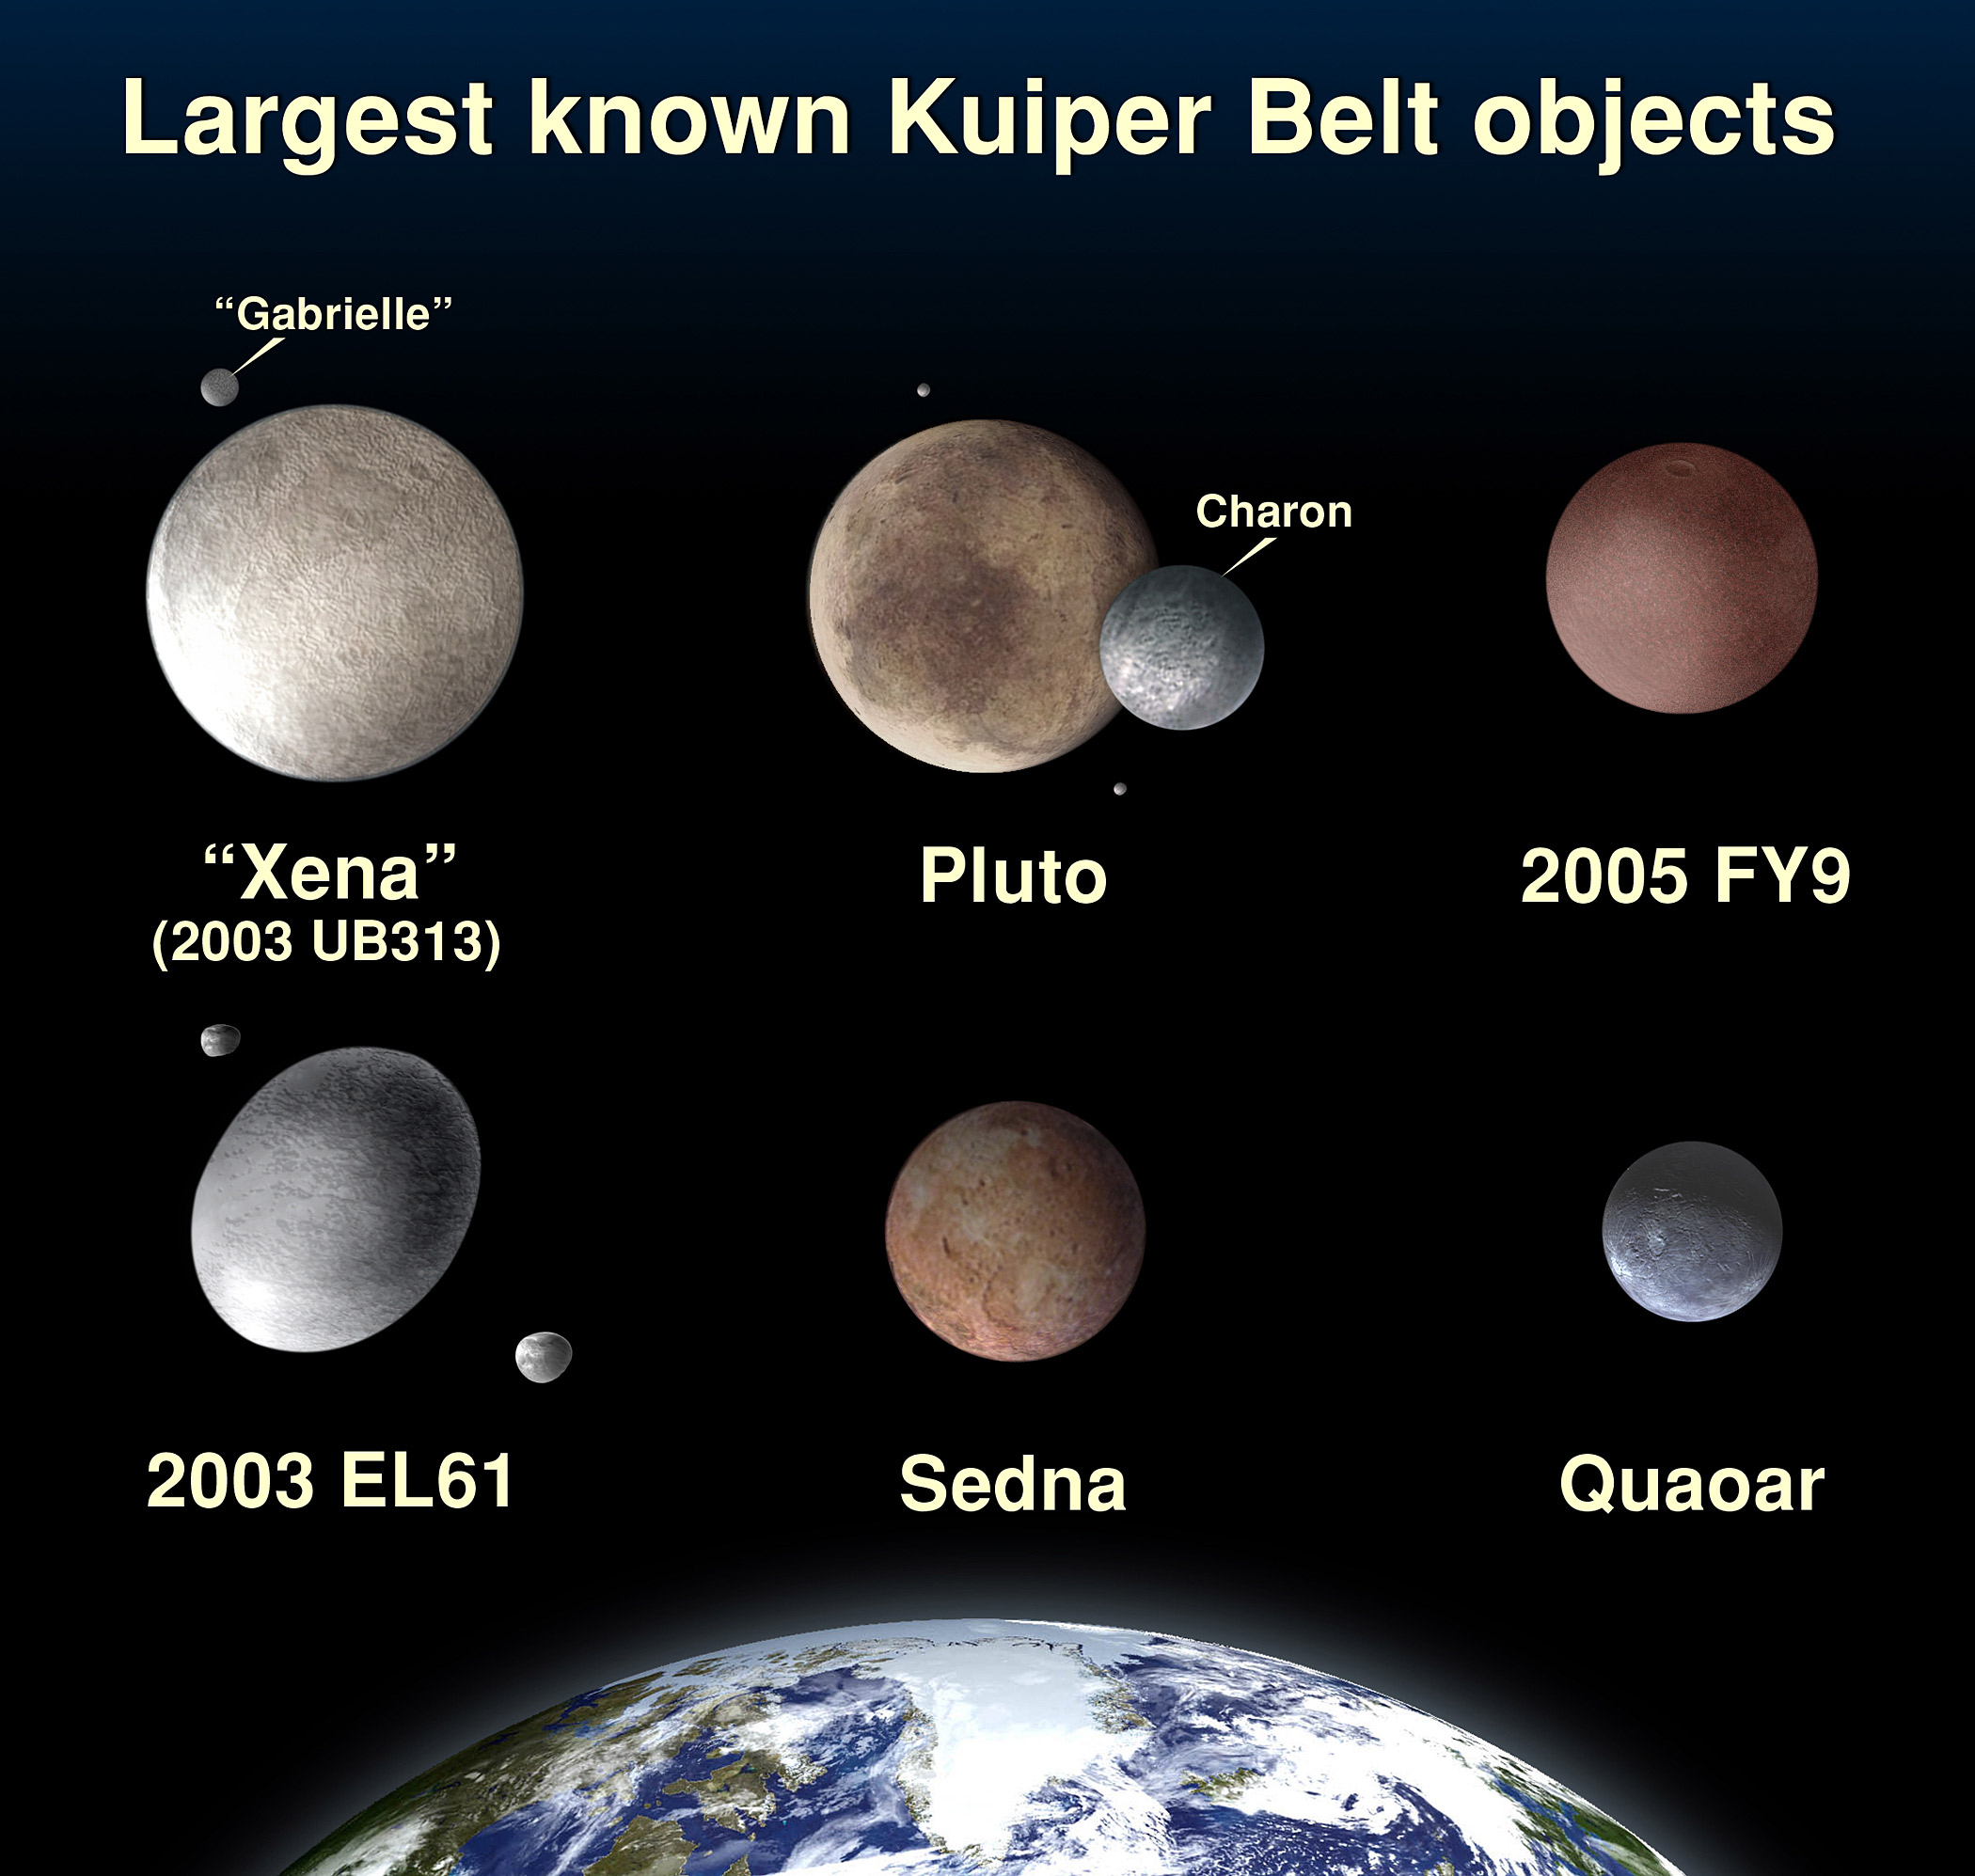

Comparison of Kuiper Belt Object sizes

This is a photo illustration of the largest known Kuiper Belt objects. Xena, officially catalogued at 2003 UB313, is slightly larger than Pluto.

Credit: NASA, ESA, and A. Feild (STScI)